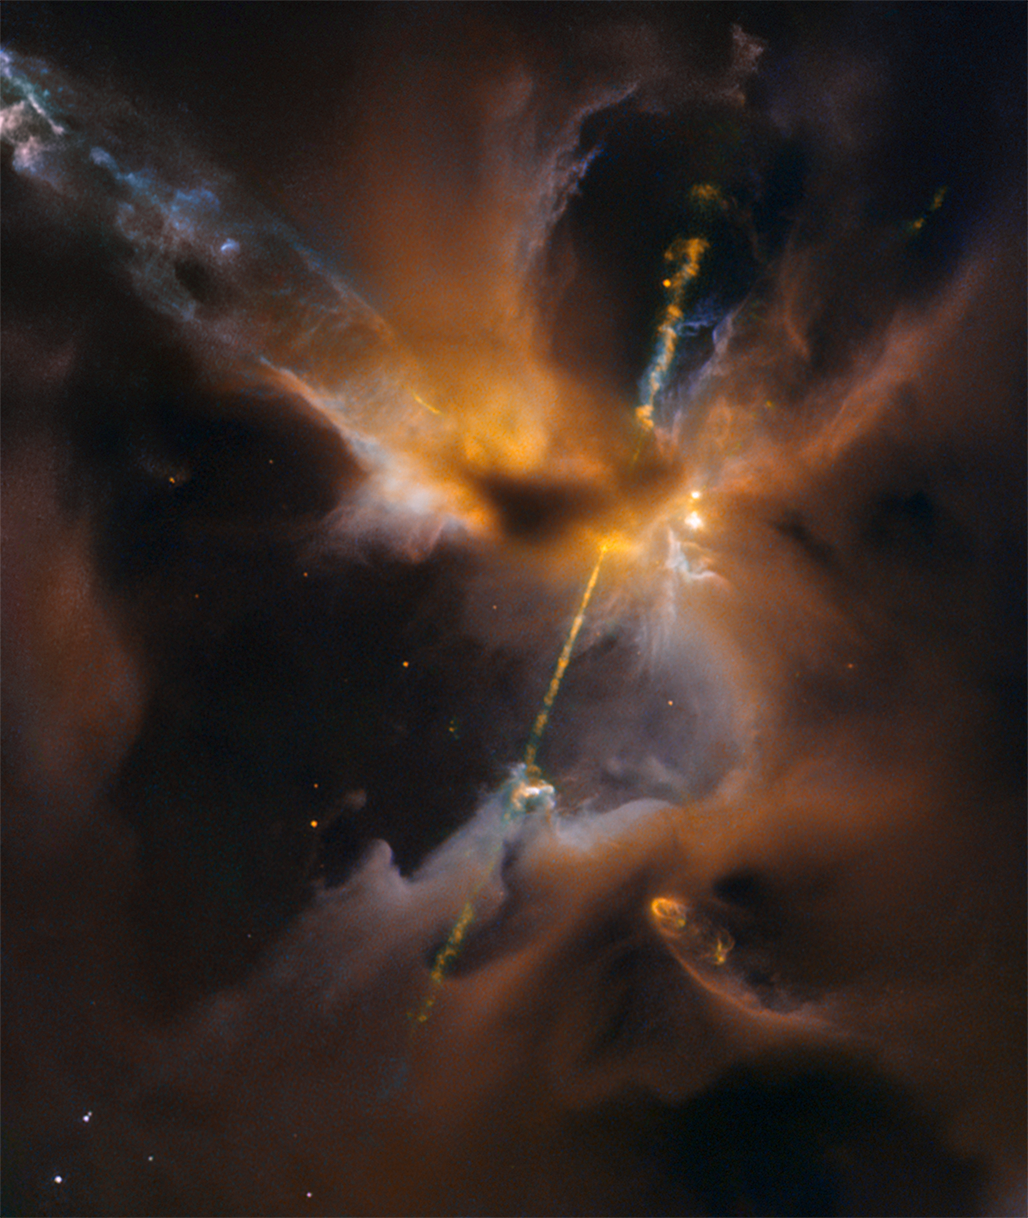

A cosmic lightsabre

The two lightsabre-like streams crossing the image are jets of energised gas, ejected from the poles of a young star. If the jets collide with the surrounding gas and dust they can clear vast spaces, and create curved shock waves, seen as knotted clumps called Herbig-Haro objects.

Credit: ESA/Hubble & NASA, D. Padgett (GSFC), T. Megeath (University of Toledo), and B. Reipurth (University of Hawaii)